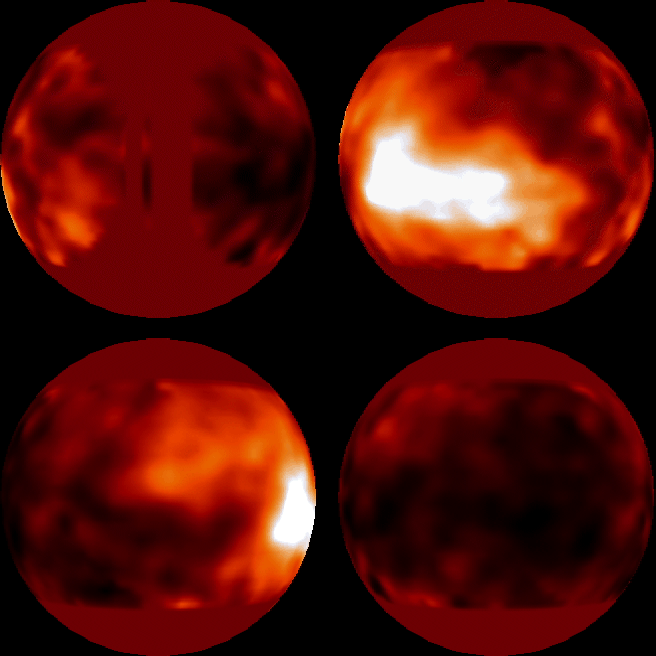

Surface of Titan

Scientists for the first time have made images of the surface of Saturn's giant, haze-shrouded moon, Titan. They mapped light and dark features over the surface of the satellite during nearly a complete 16-day rotation. One prominent bright area they discovered is a surface feature 2, 500 miles across (about 4025 kilometres), about the size of the continent of Australia.

Credit: UA Lunar and Planetary Laboratory